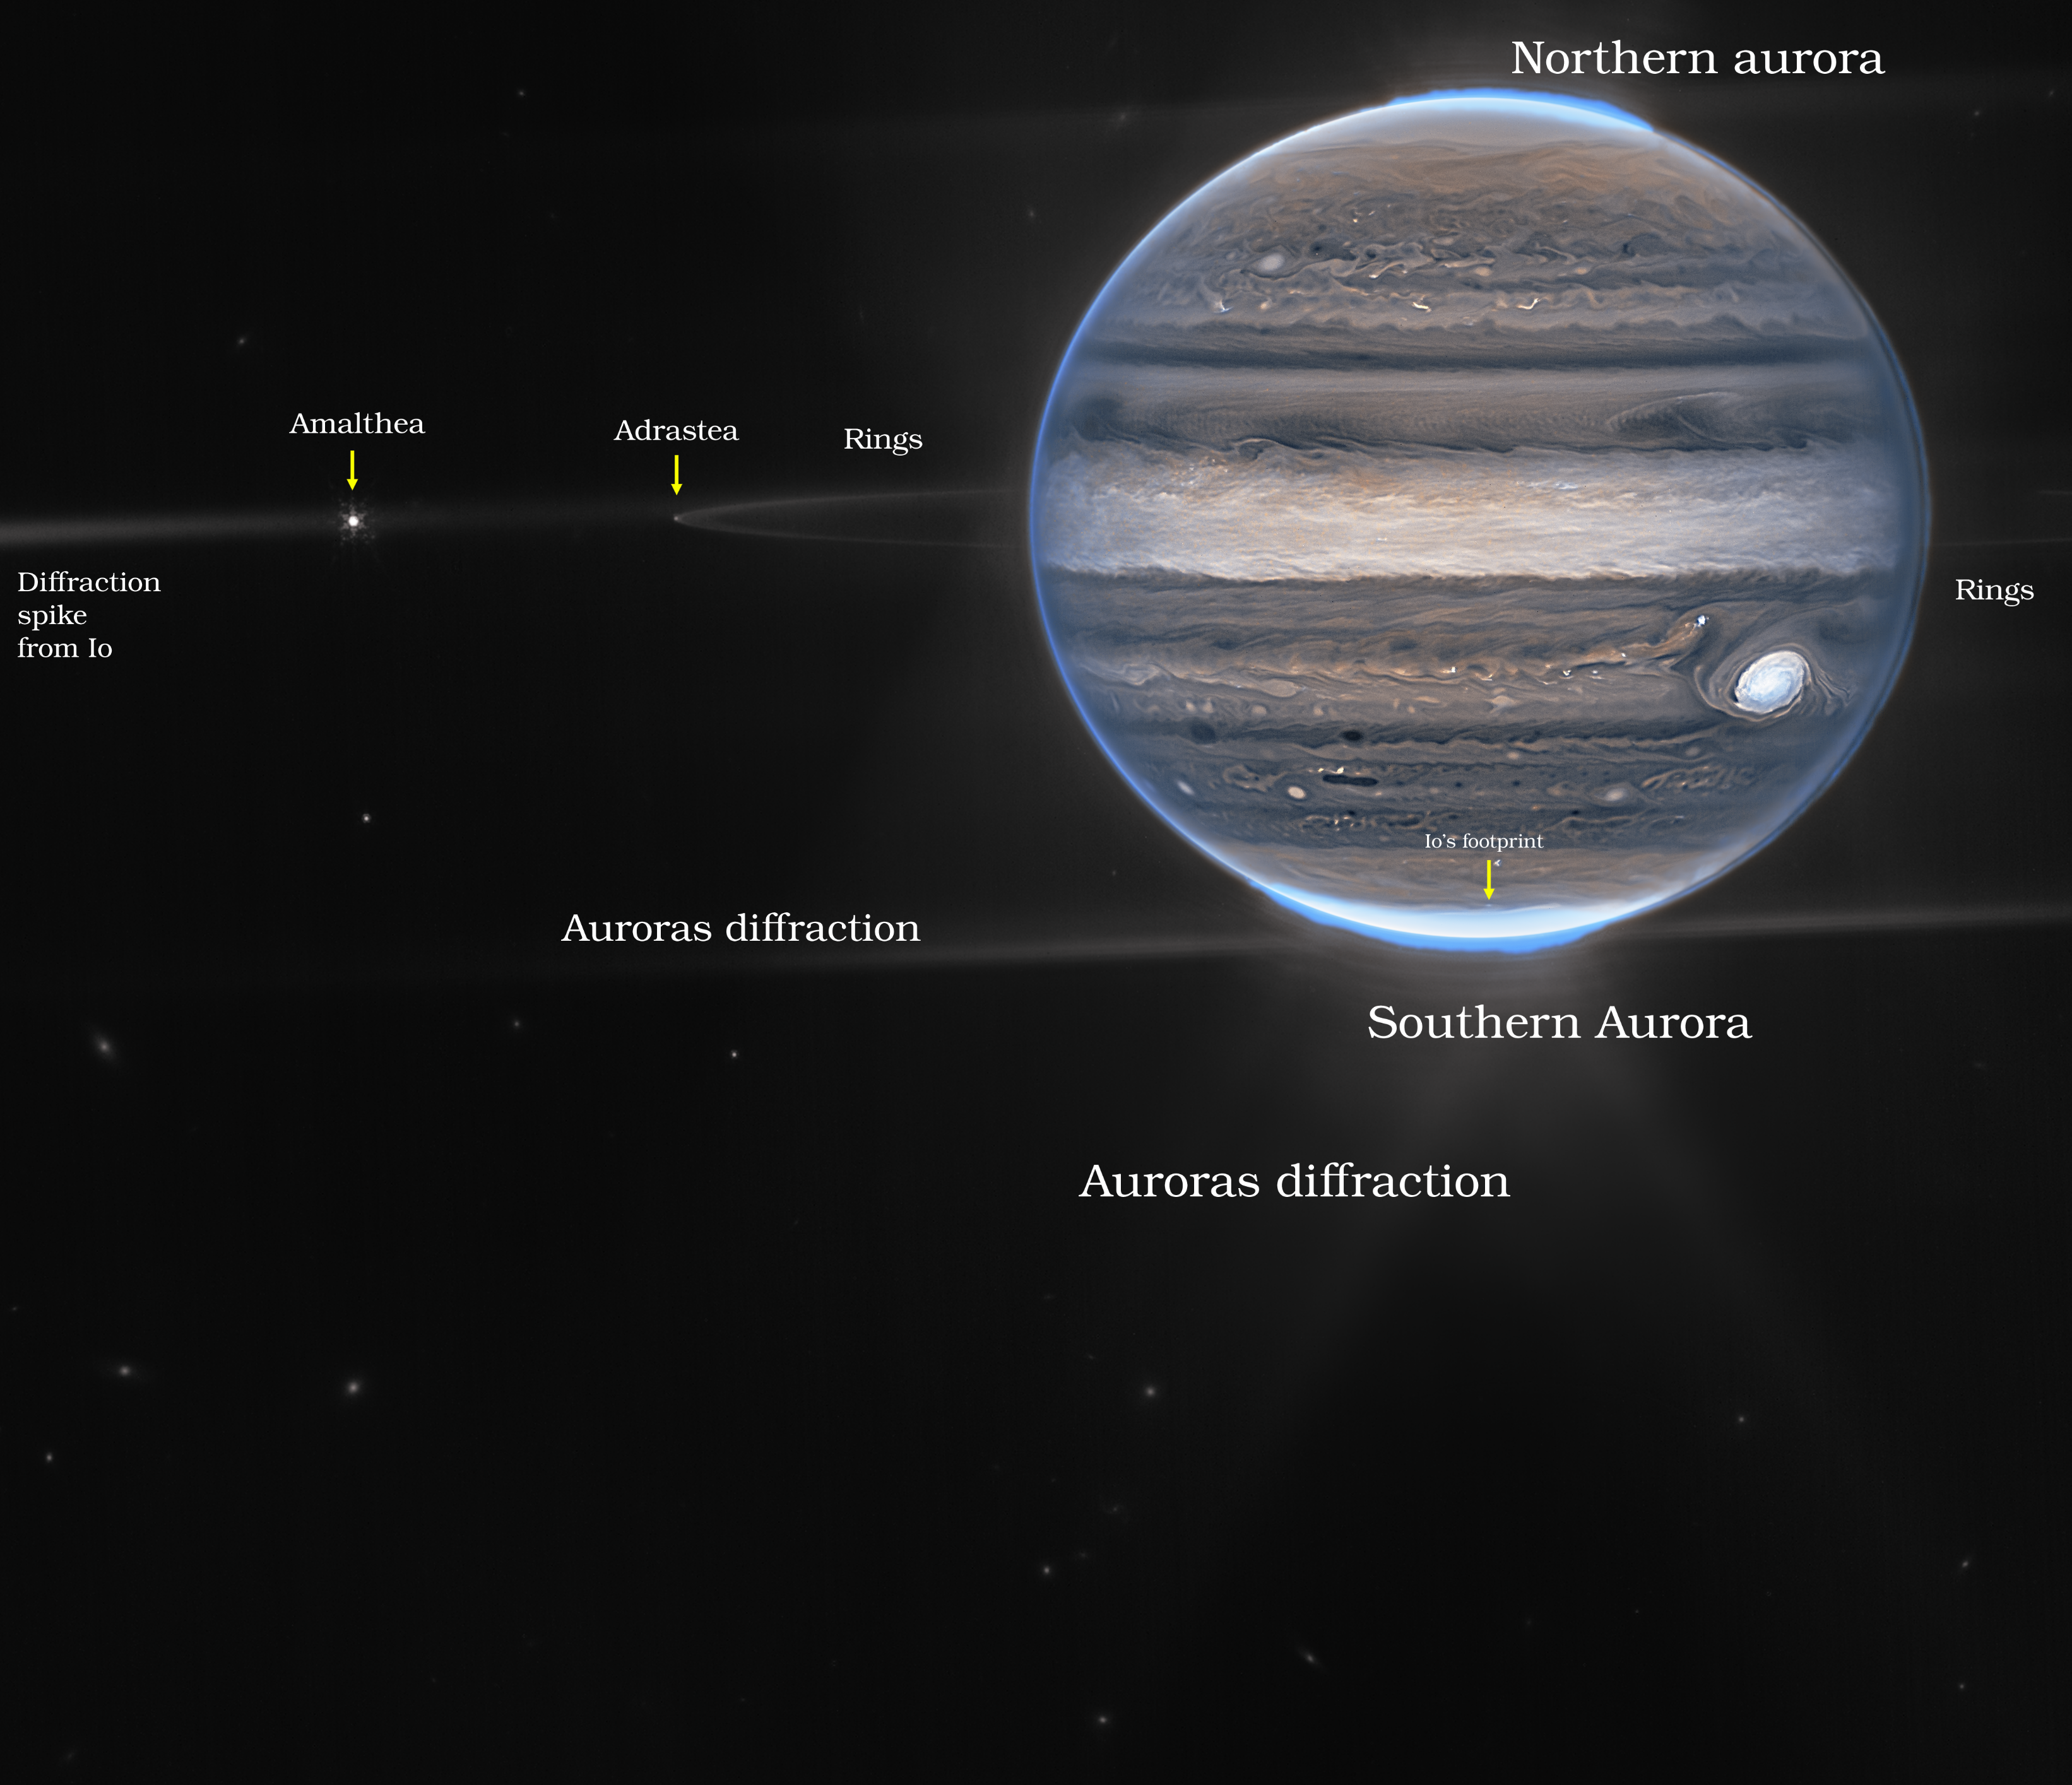

Jupiter Showcases Auroras, Hazes (NIRCam Widefield View - Annotated)

With giant storms, powerful winds, auroras, and extreme temperature and pressure conditions, Jupiter has a lot going on. Now, the NASA/ESA/CSA James Webb Space Telescope has captured new images of the planet. Webb’s Jupiter observations will give scientists even more clues to Jupiter’s inner life.

In this wide-field view, Webb sees Jupiter with its faint rings, which are a million times fainter than the planet, and two tiny moons called Amalthea and Adrastea. The fuzzy spots in the lower background are likely galaxies “photobombing” this Jovian view.

This is a composite image from Webb’s NIRCam instrument (two filters) and was acquired on 27 July 2022.

Credit: NASA, ESA, Jupiter ERS Team; image processing by Ricardo Hueso (UPV/EHU) and Judy Schmidt